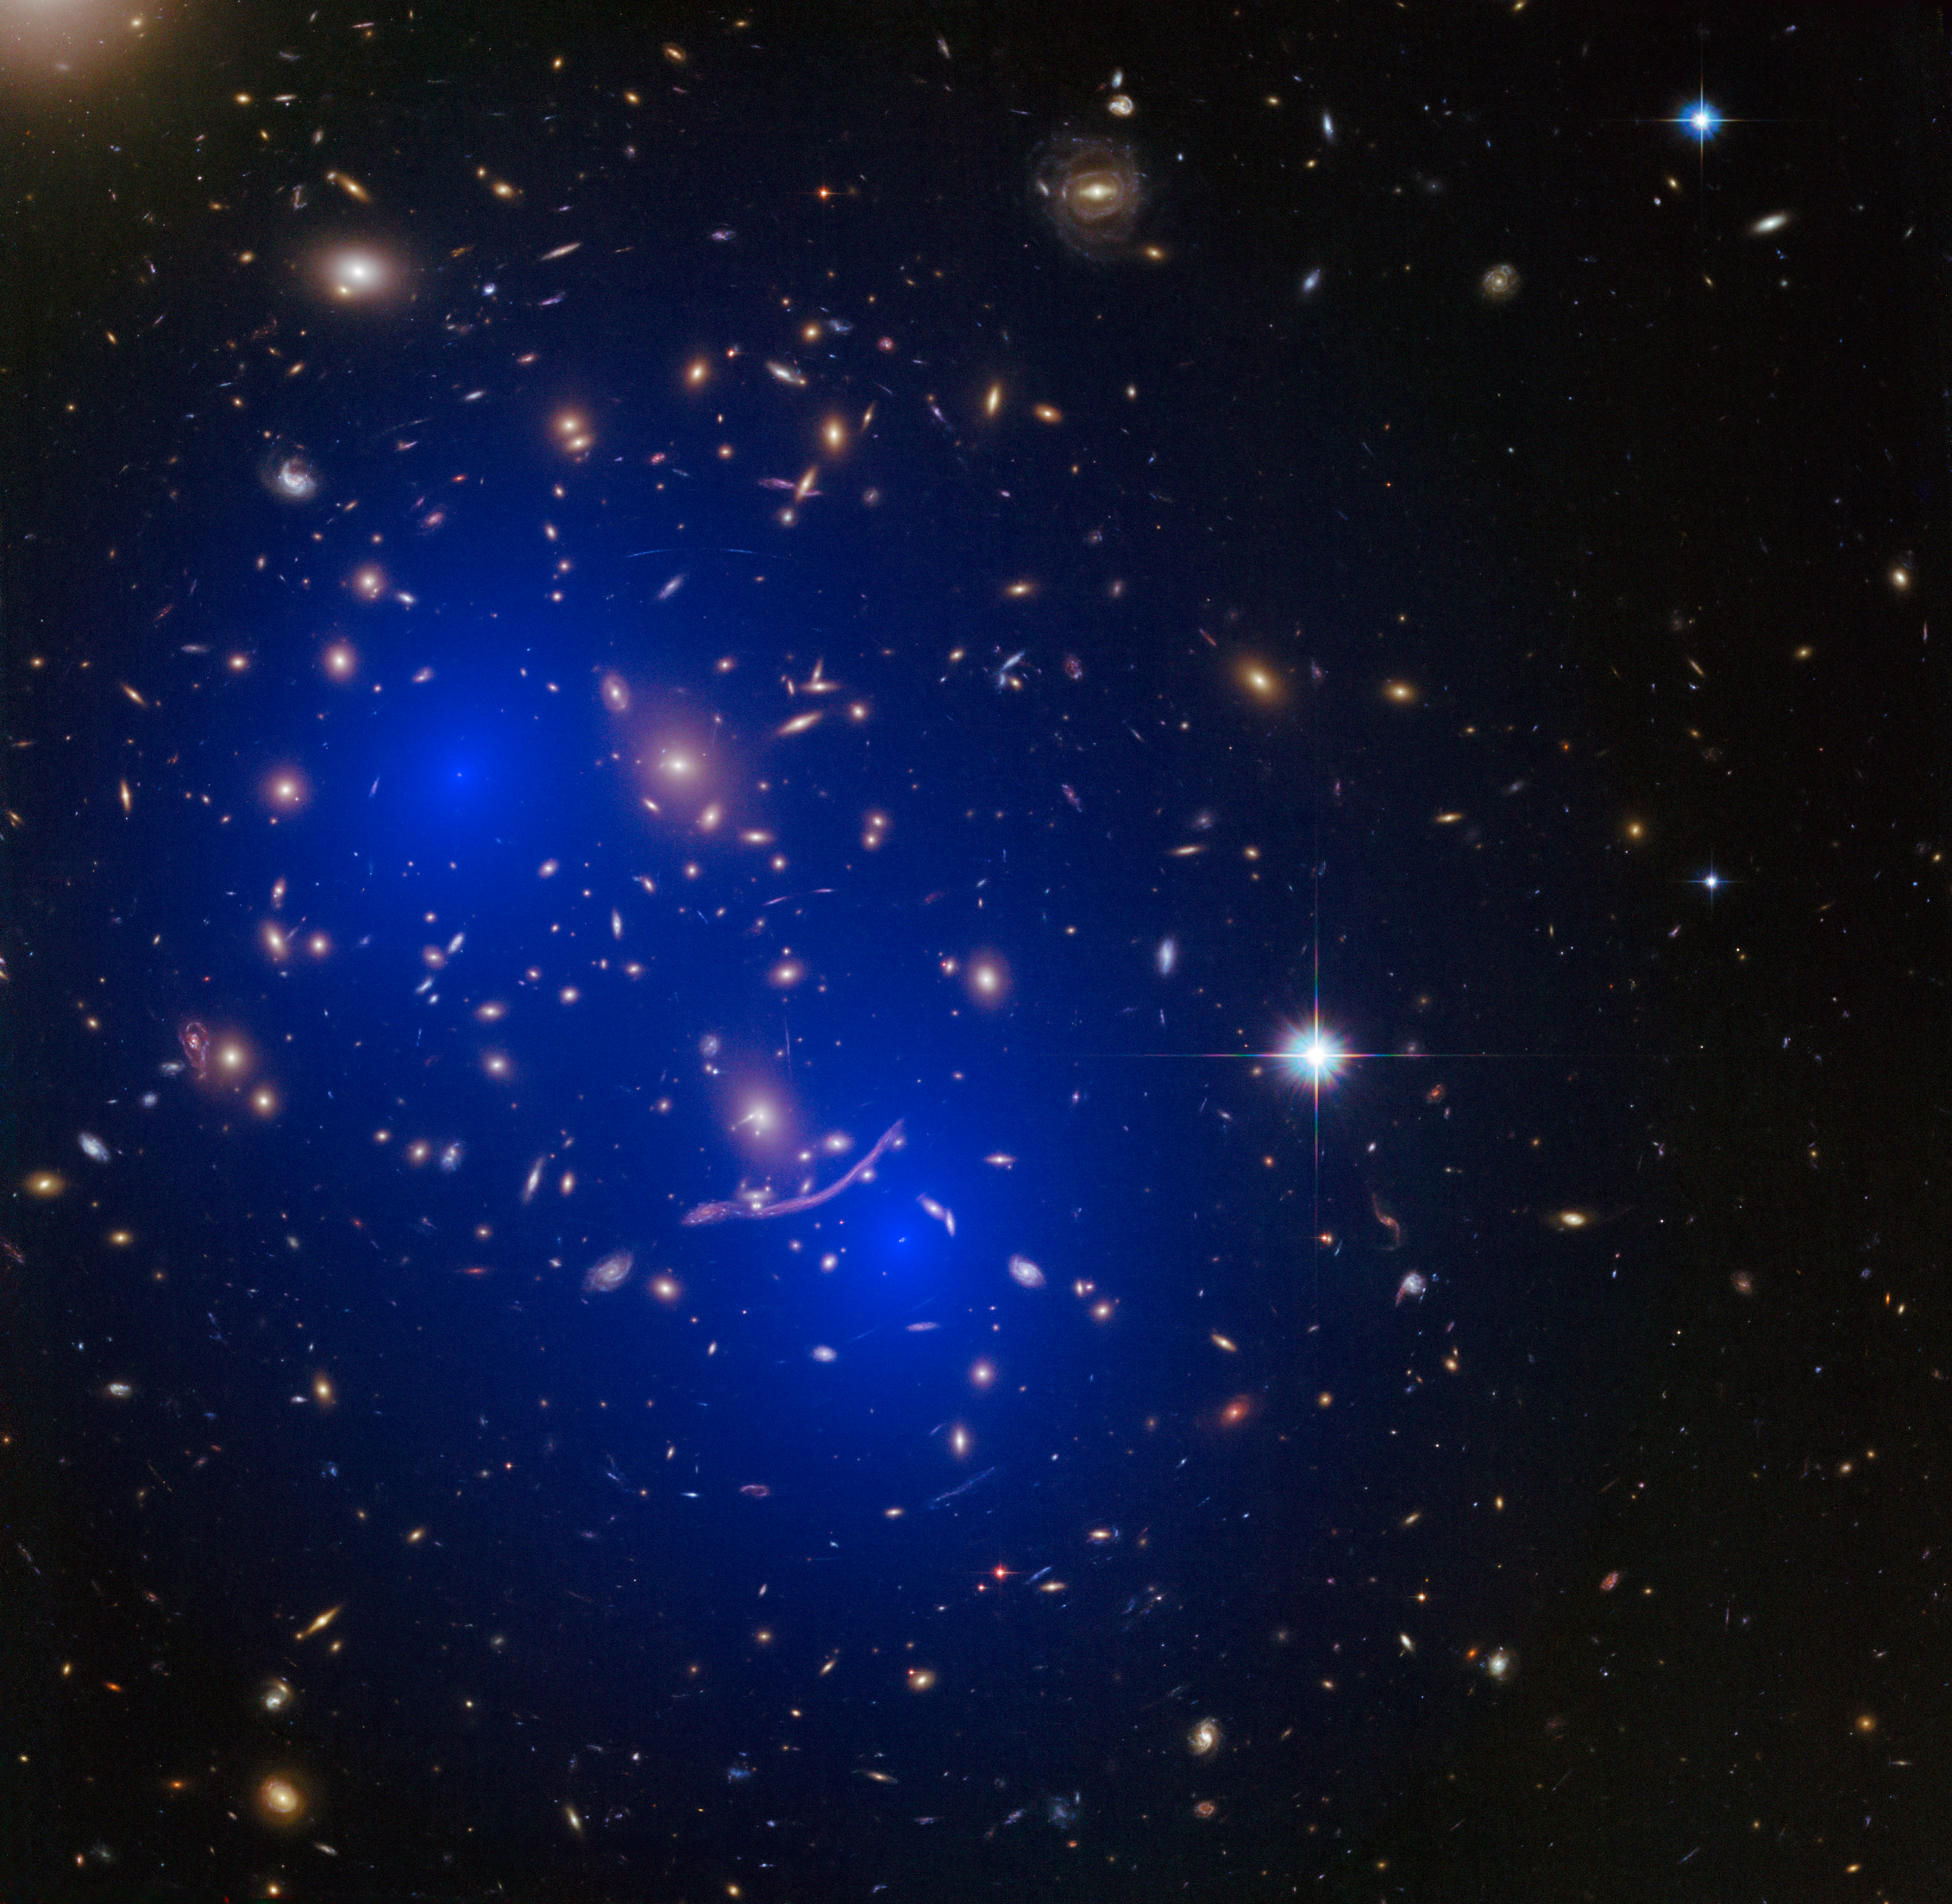

Galaxy cluster Abell 370 with dark matter map

This is a NASA/ESA Hubble Space Telescope image of the galaxy cluster Abell 370. Shown in blue on the image is a map of the dark matter found within the cluster. This cluster was part of a study of 72 galaxy cluster collisions which determined that dark matter interacts with other dark matter even less than previously thought.

Credit: NASA, ESA, D. Harvey (École Polytechnique Fédérale de Lausanne, Switzerland), R. Massey (Durham University, UK), the Hubble SM4 ERO Team and ST-ECF